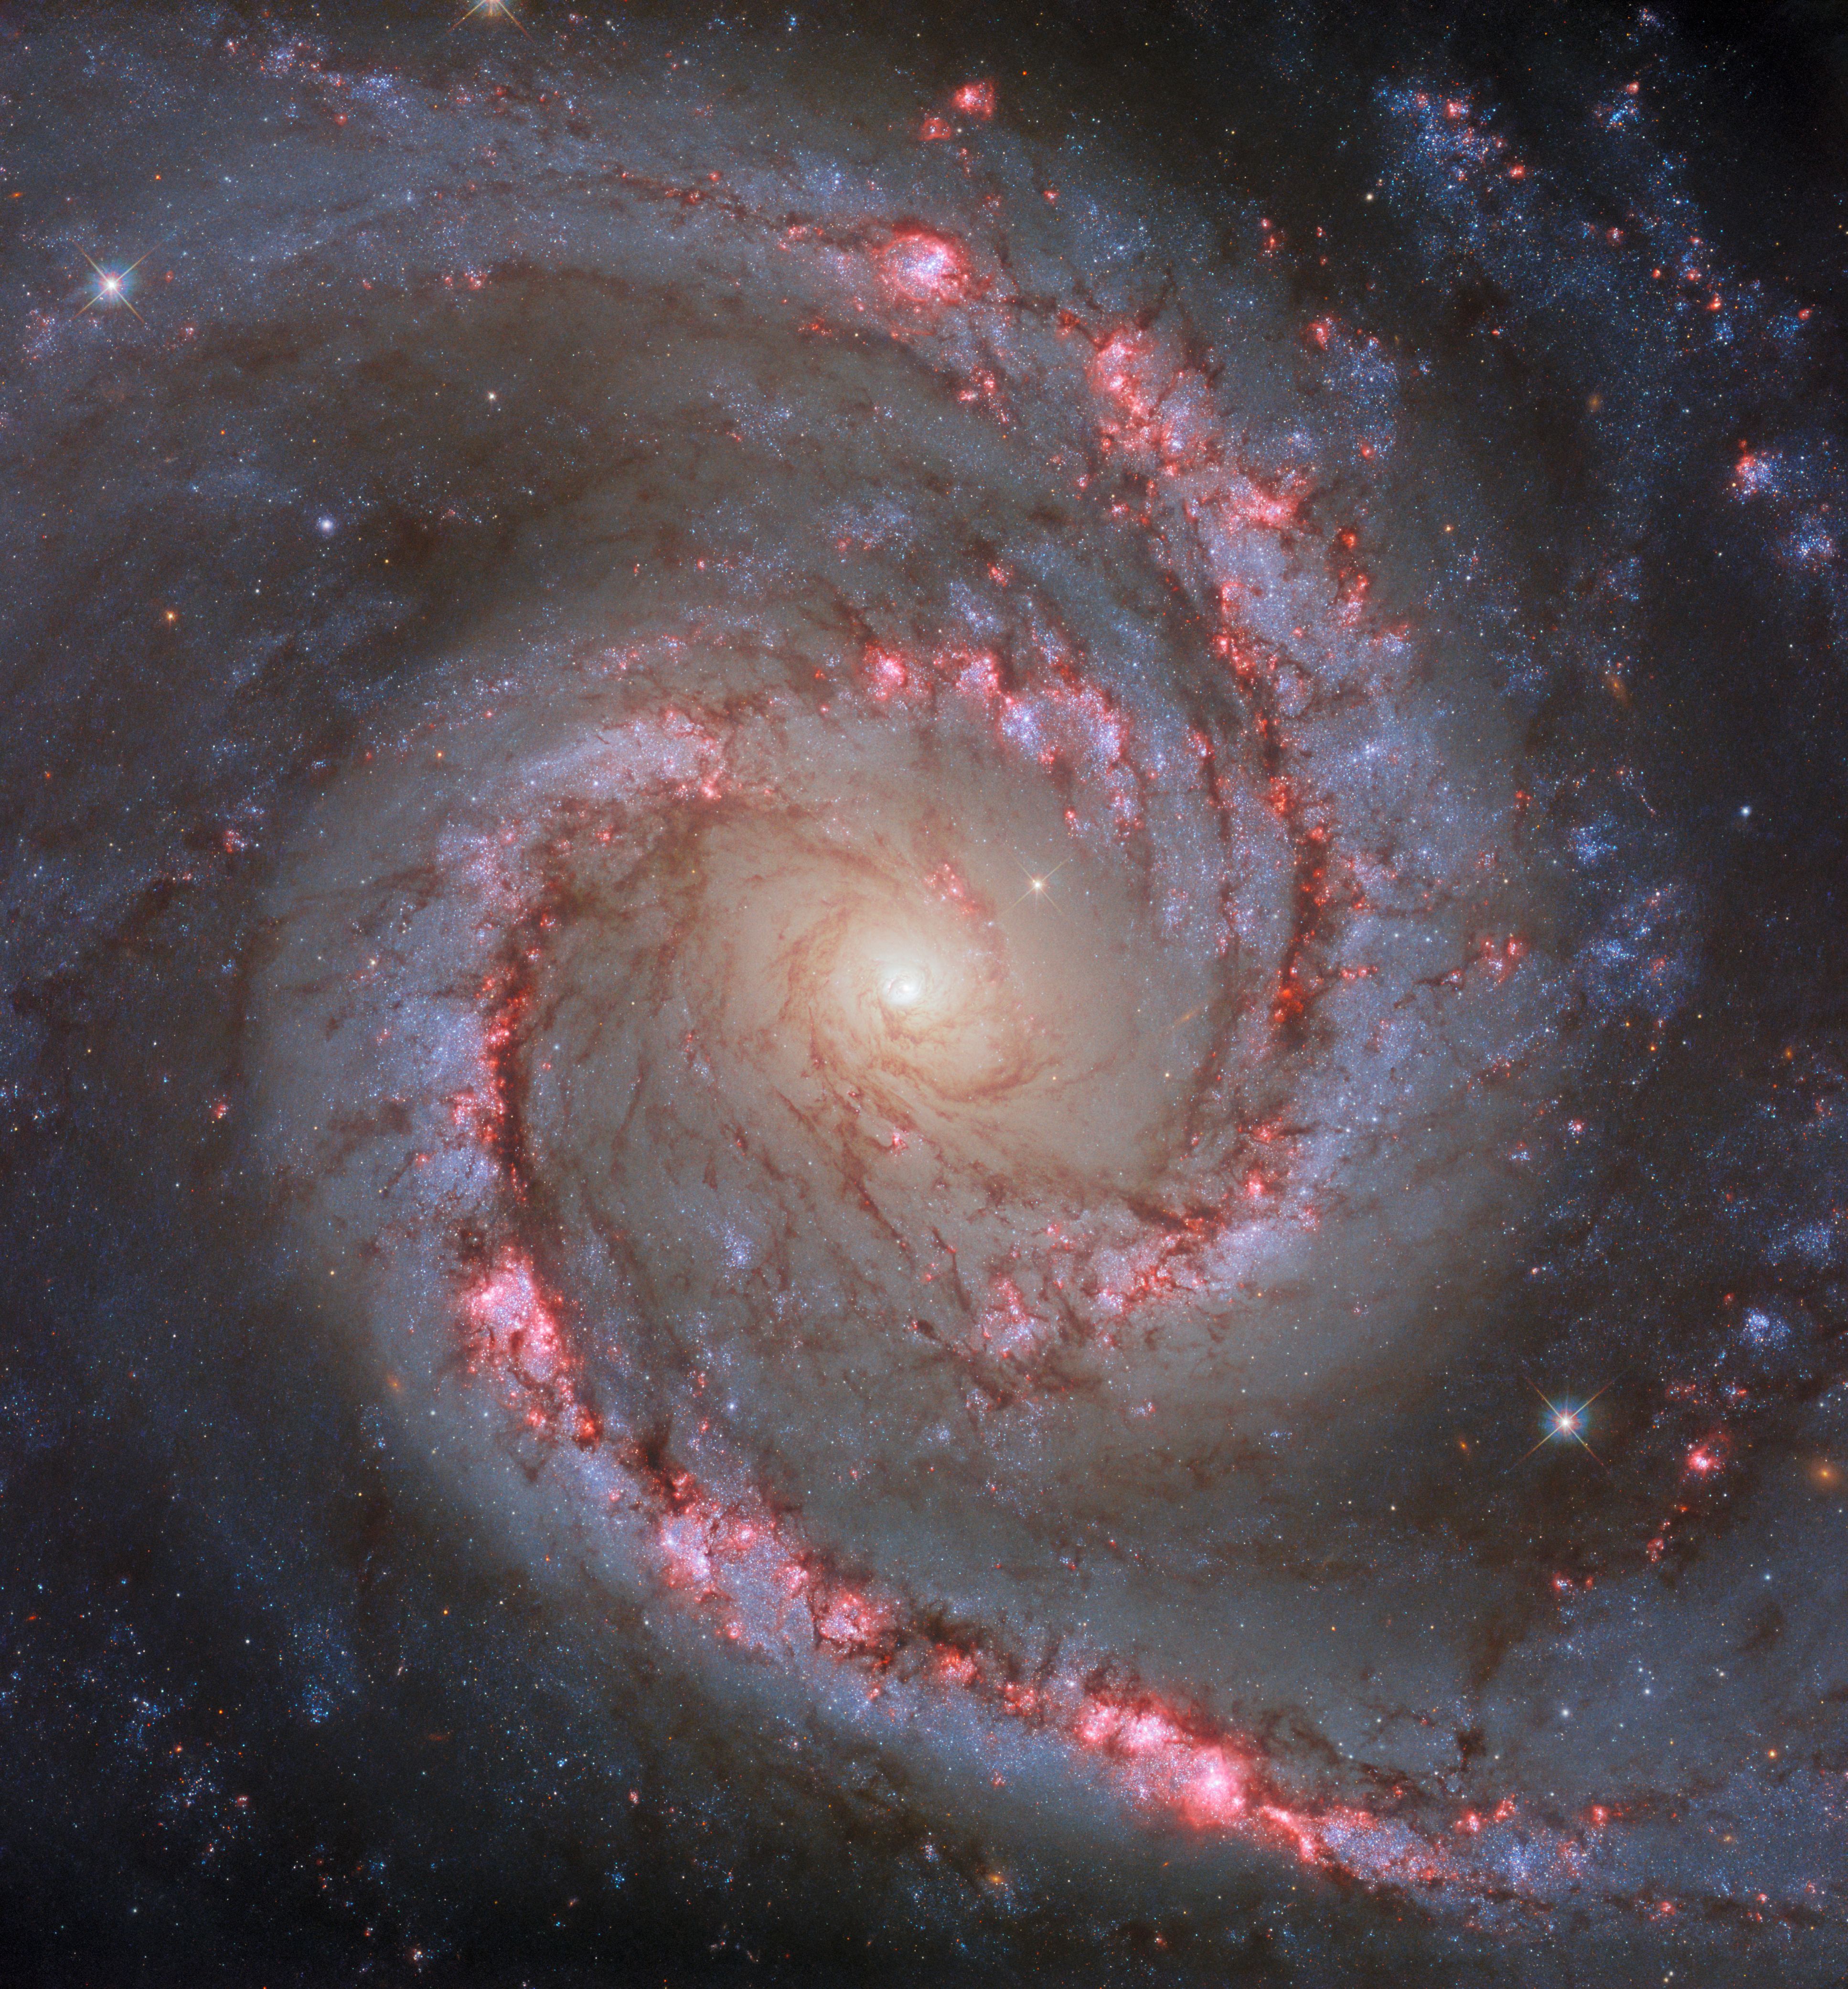

The dancer in Dorado

This vibrant and dynamic-looking image features the spiral galaxy NGC 1566, which is sometimes informally referred to as the ‘Spanish Dancer Galaxy’. Like the subject of another recent Hubble Picture of the Week, NGC 1566 is a weakly-barred or intermediate spiral galaxy, meaning that it does not have either a clearly present or a clearly absent bar-shaped structure at its centre. The galaxy owes its nickname to the vivid and dramatic swirling lines of its spiral arms, which could evoke the shapes and colours of a dancer’s moving form. NGC 1566 lies around 60 million light-years from Earth in the constellation Dorado, and is also a member of the Dorado galaxy group.

Galaxy groups are assemblages of gravitationally bound galaxies. Groups differ from galaxy clusters in size and mass: galaxy clusters may contain hundreds of galaxies, whereas groups might contain several tens of galaxies. That said, there is not a precise delineation between the definition of a galaxy group and a galaxy cluster. Some astronomers have proposed that the definitions be sharpened up, with one suggestion that galaxy aggregations with less mass than 80 trillion Suns should qualify as galaxy groups.

The Dorado group has had a fluctuating membership over the past few decades, with various scientific papers changing its list of constituent galaxies. As an example of why it is so challenging for astronomers to pin down members of groups such as the Dorado group, we can imagine a photograph of an adult human and a large oak tree. We have foreknowledge of the approximate size of the person and the tree, so if we were to see a photo where the person appeared roughly the same size as the tree, then we would be able to guess that, in reality, the person was positioned much closer to the camera than the tree was, giving the false impression that they were the same size. When working out members of a galaxy group, astronomers are not necessarily equipped with the knowledge of the size of the individual galaxies, and so have to work out whether galaxies really are relatively close together in space, or whether some of them are actually much closer or much further away. This has become easier with more sophisticated observation techniques, but still sometimes presents a challenge.

Credit: ESA/Hubble & NASA, D. Calzetti and the LEGUS team, R. Chandar